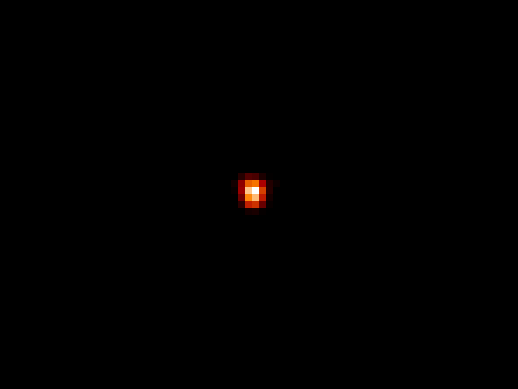

Hubble Simulation of I Zw 18

This image was created by modifying the original Hubble photo of I Zw 18. The image shows how the galaxy would look if it appeared at a distance of 3 billion light-years.

The simulation shows that we see far less of the galaxy as the fainter stars cannot be seen at large distances. It is therefore believed that astronomers only see the 'tip of the iceberg' when they point their large telescopes at the heavens.

Credit: A. Fruchter and Z. Levay (STScI)